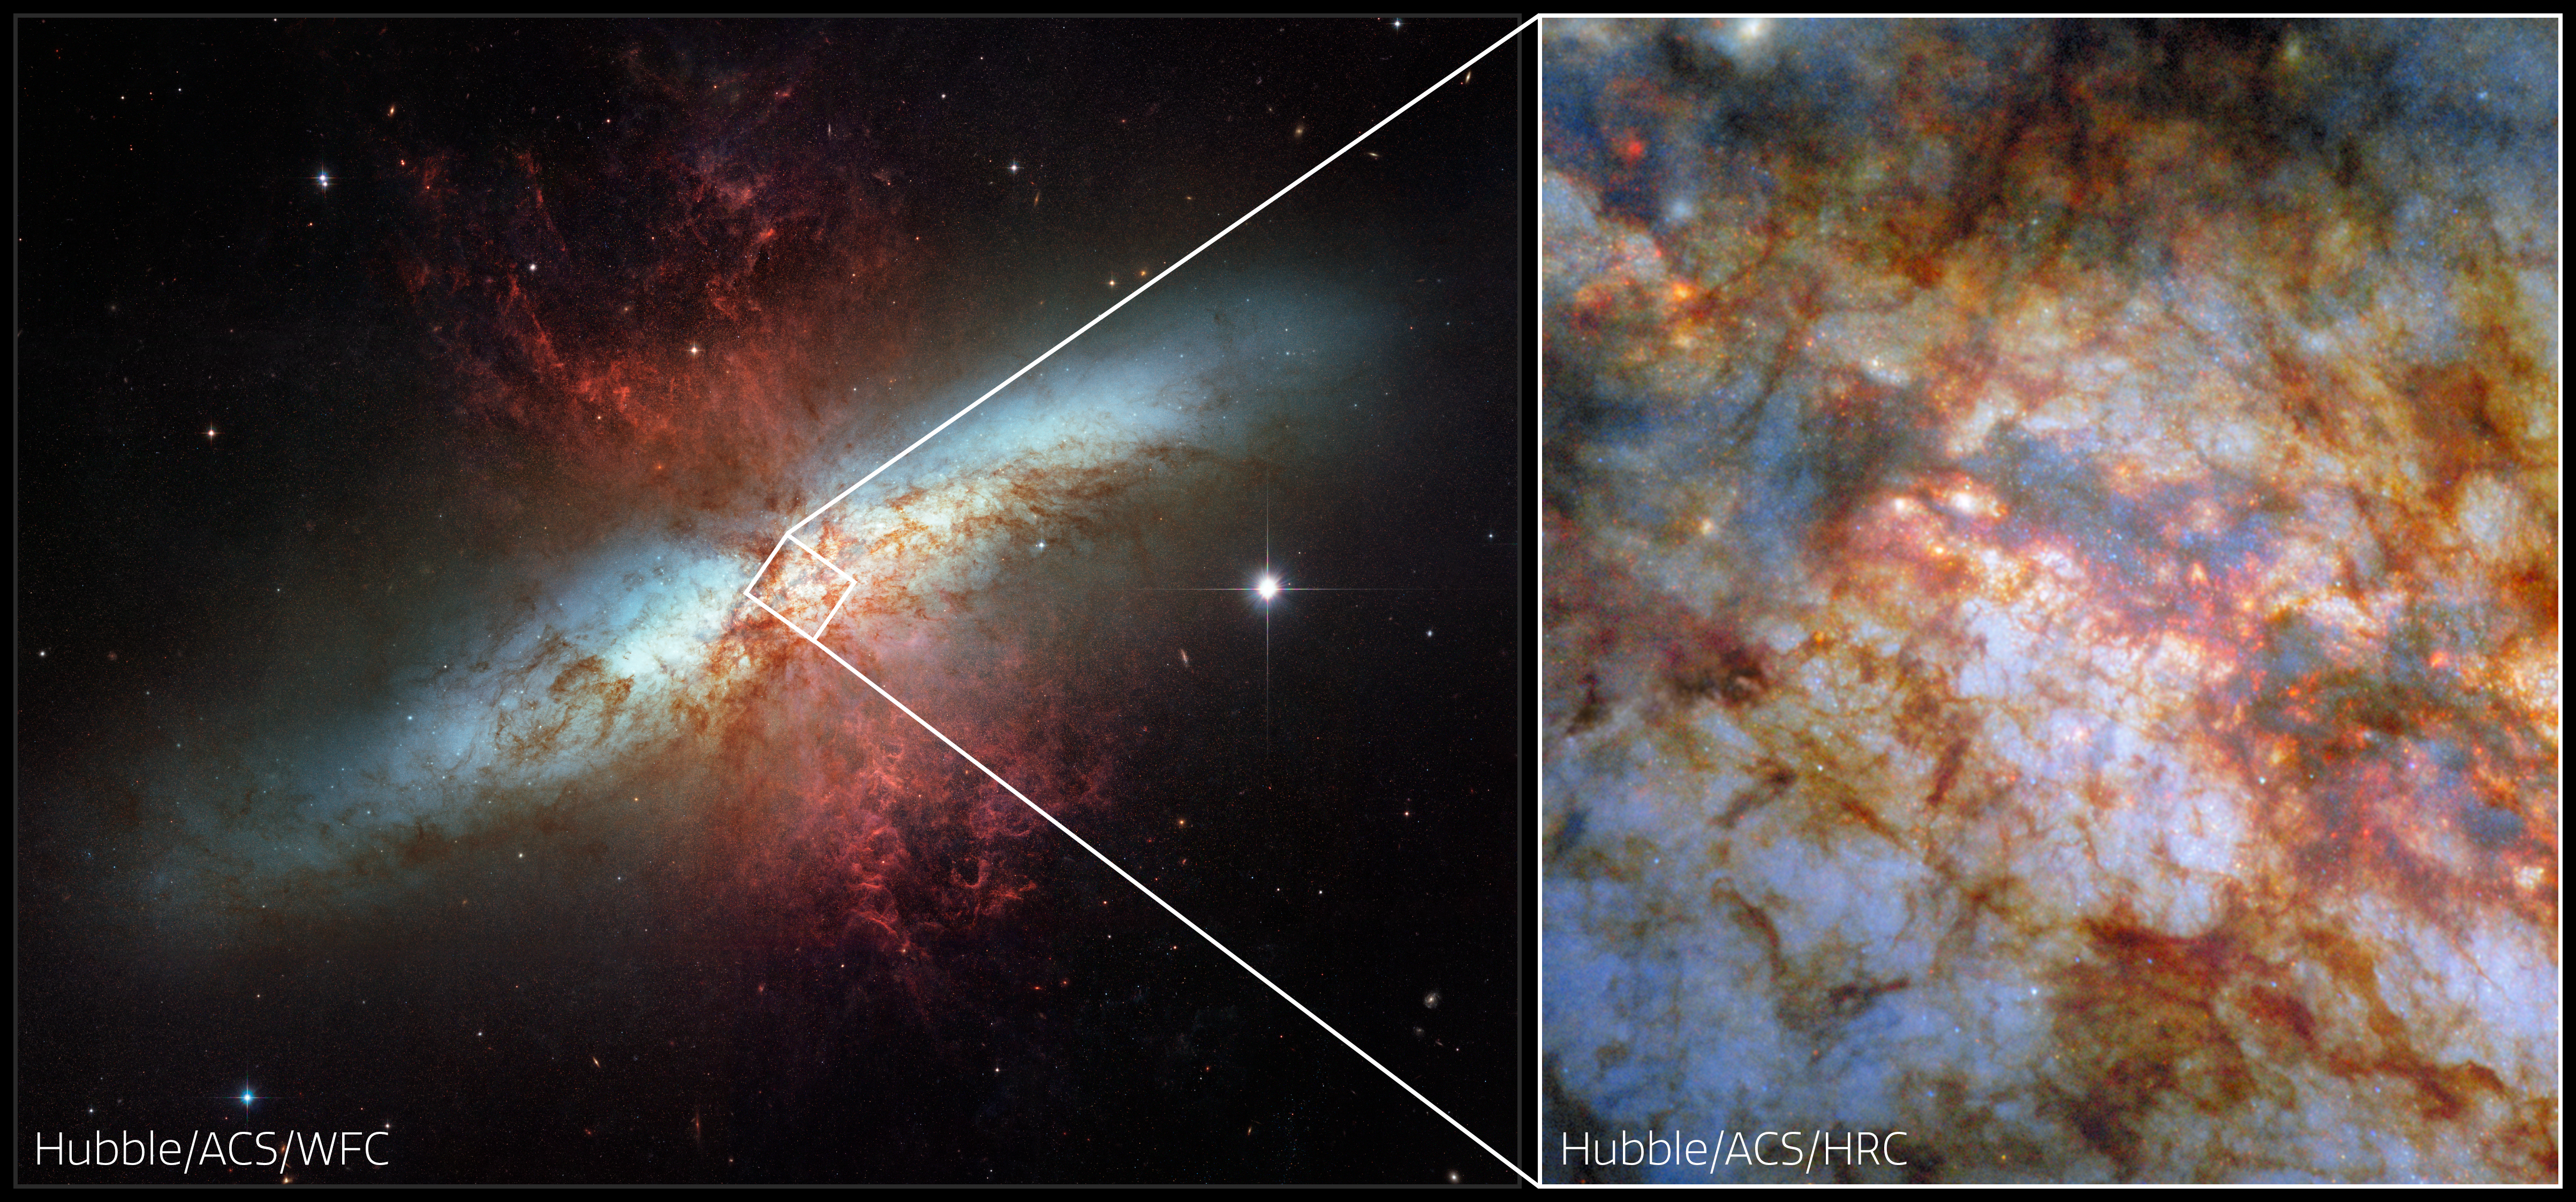

M82 and its smouldering heart (horizontal collage)

What lurks behind the dense, dusty clouds of this galactic neighbour? There lies the star-powered heart of the galaxy Messier 82 (M82), also known as the Cigar Galaxy. Located just 12 million light-years away in the constellation Ursa Major (The Great Bear), the Cigar Galaxy is considered a nearby galaxy. As this NASA/ESA Hubble Space Telescope Picture of the Week shows in great detail, it’s home to brilliant stars whose light is shaded by sculptural clouds, clumps and streaks of dust and gas.

It’s no surprise that the Cigar Galaxy is so packed with stars, obscured though they might be by the distinctive clouds pictured here. Forming stars 10 times faster than the Milky Way, the Cigar Galaxy is what astronomers call a starburst galaxy. The intense starburst period that grips this galaxy has given rise to super star clusters in the galaxy’s heart. Each of these super star clusters contains hundreds of thousands of stars and is more luminous than a typical star cluster. Researchers used Hubble to home in on these massive clusters and reveal how they form and evolve.

This image compares two sets of data captured by the Advanced Camera for Surveys (ACS). On the left is an image of the Cigar Galaxy released in 2006, in celebration of Hubble’s 16th birthday. It was taken with ACS’s Wide Field Channel that is designed for broad surveys. On the right, newly processed data from the ACS High Resolution Channel creates a new view of the highly active super star clusters in M82’s heart. The High Resolution Channel, operational from 2002 to 2007, excelled at detailed observations of crowded, starry environments like the centres of starburst galaxies.

Credit: ESA/Hubble & NASA, the Hubble Heritage Team (STScI), W. D. Vacca